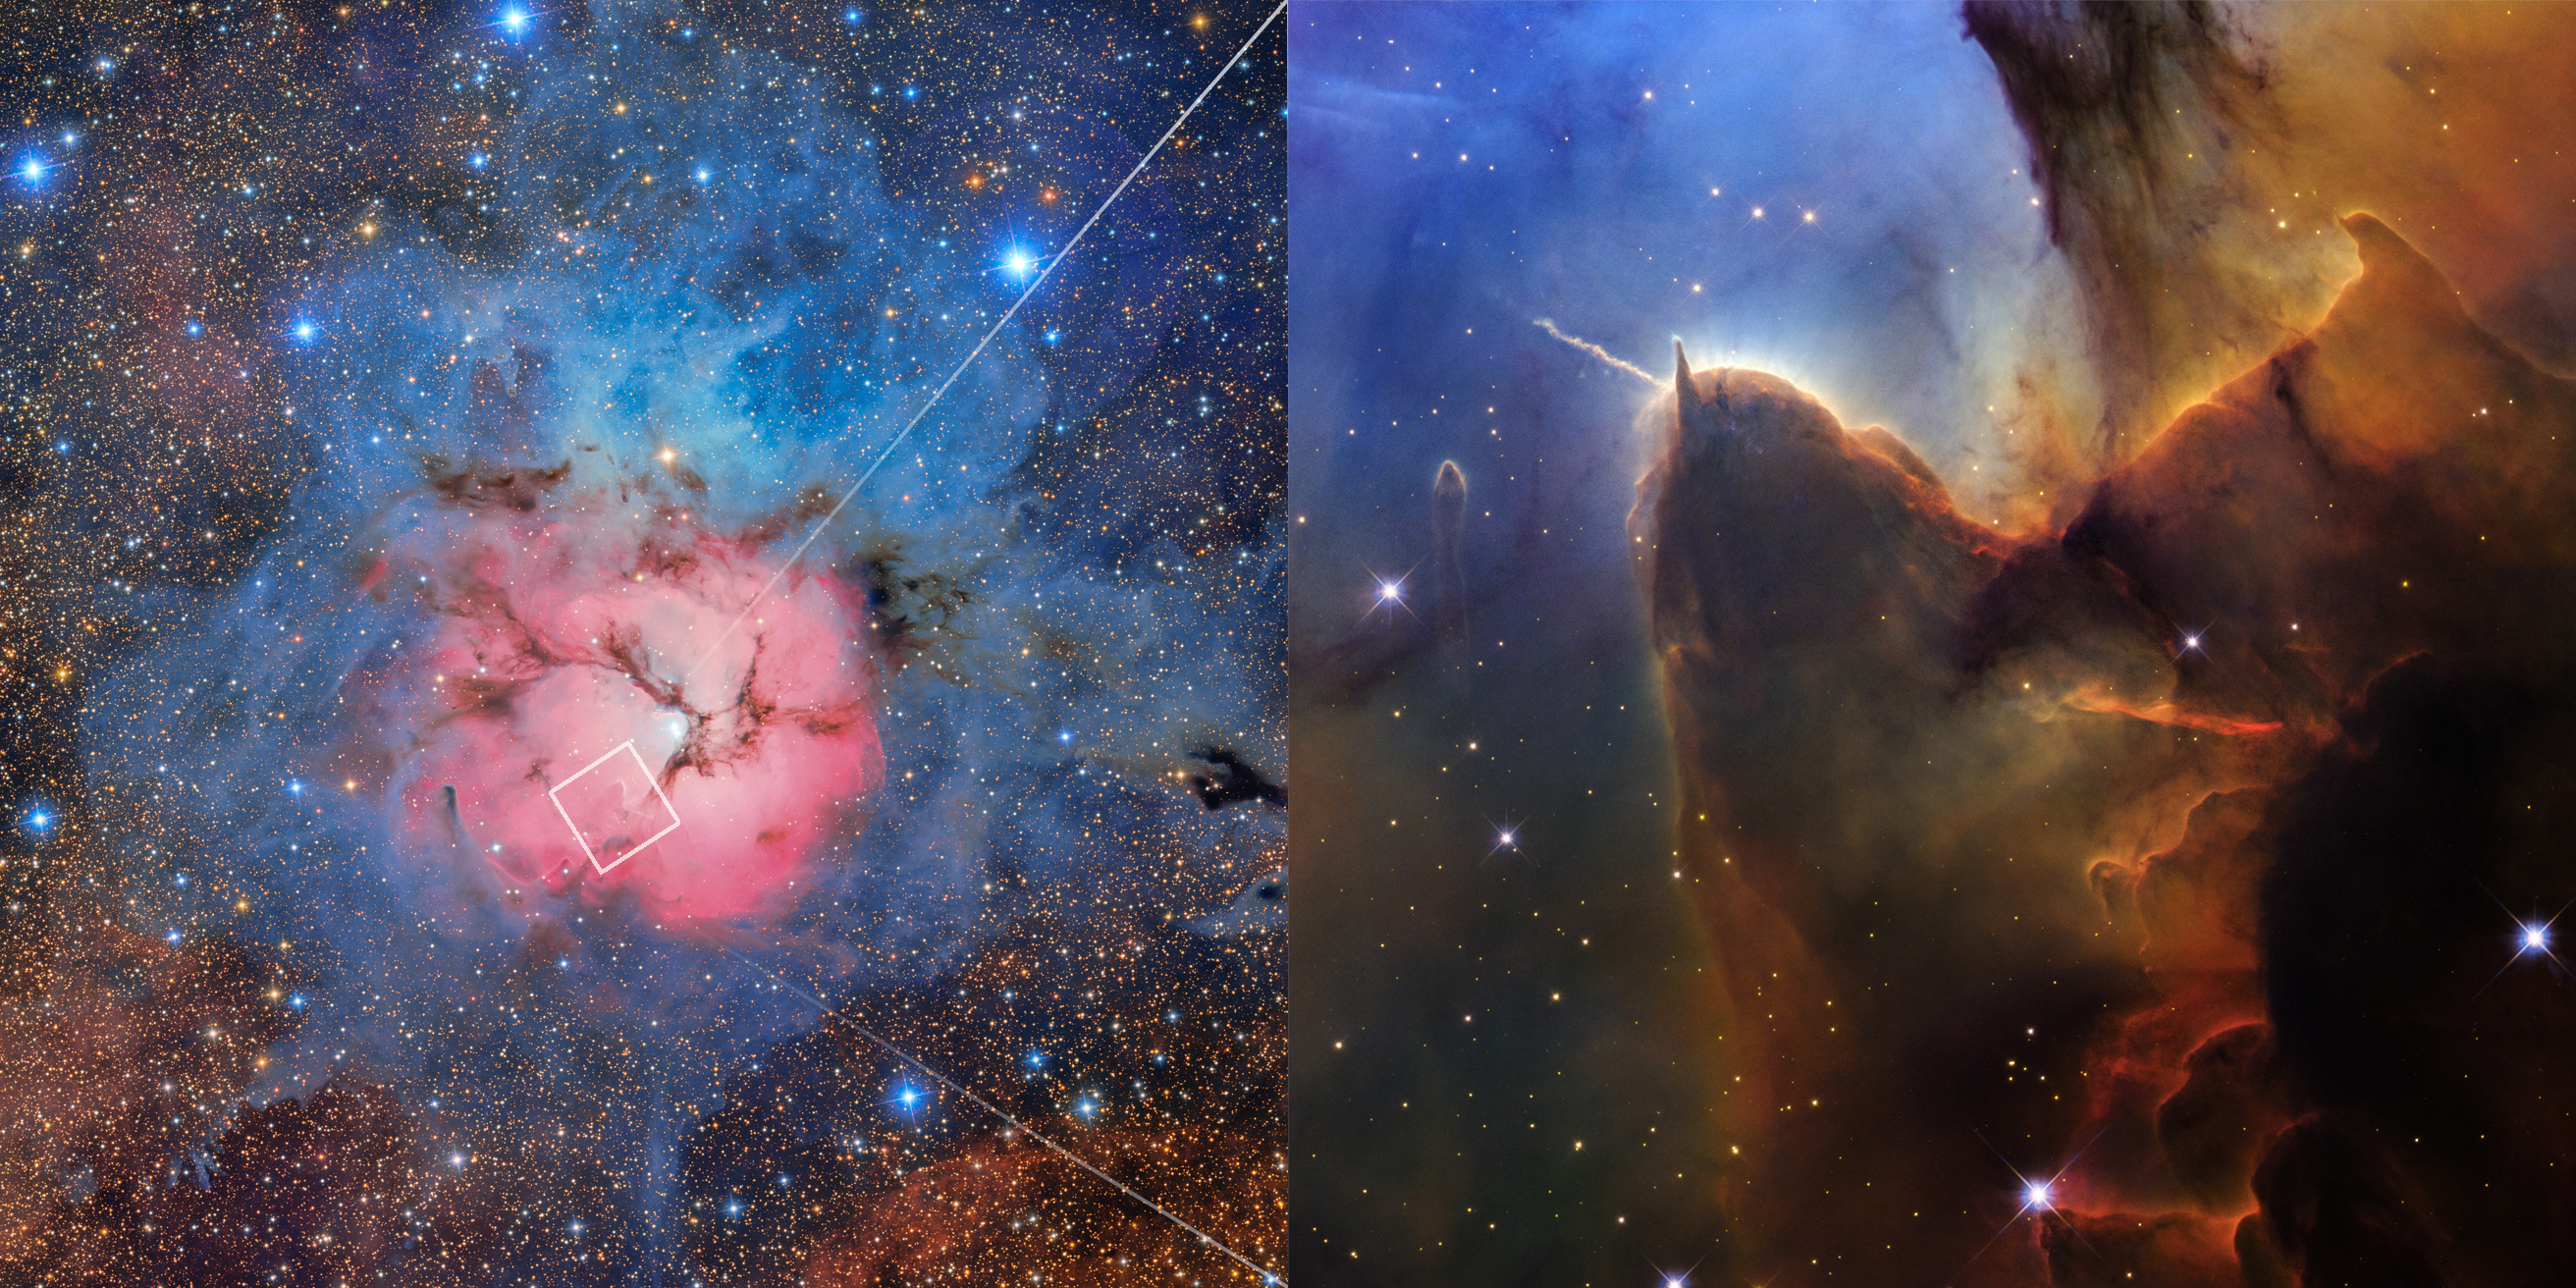

Full Trifid Nebula (Rubin Image with Hubble Close-up)

At left is a complete view of the Trifid Nebula (Messier 20 or M20) captured by the NSF-DOE Vera C. Rubin Observatory in Chile. A white box in the lower-left portion of the pink region shows the area the NASA/ESA Hubble Space Telescope targeted, and Hubble’s new image is featured at right.

Rubin’s field of view is approximately 56 light-years across, while Hubble’s is about four light-years across.

The colour assignments in the images vary based on the filters in the telescopes’ cameras. Rubin takes broadband images, which capture the full visible spectrum to show natural colours in red, green, and blue. For this image, Hubble captured narrowband images of specific chemical elements. Sulfur, hydrogen, and oxygen were mapped to red, green, and blue, respectively, to make this composite image.

Credit: NASA, ESA, STScI. Image processing: J. DePasquale (STScI)